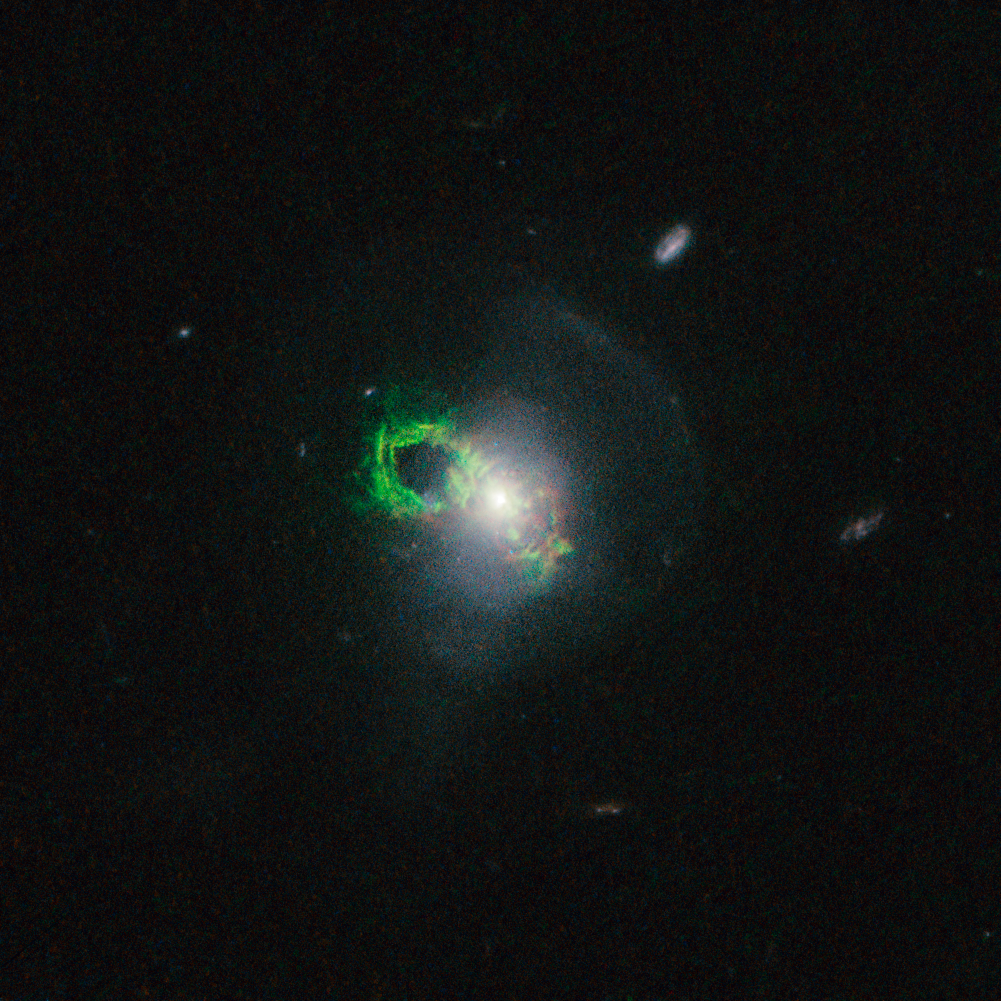

Hubble view of green filament in Teacup galaxy

This new NASA/ESA Hubble Space Telescope image shows ghostly green filaments, lying within the galaxy Teacup (also known as 2MASX J14302986+1339117). This filament was illuminated by a blast of radiation from a quasar — a very luminous and compact region that surrounds the supermassive black hole at the centre of its host galaxy.

Its bright green hue is a result of ionised oxygen, which glows brightly at green wavelengths.

Credit: NASA, ESA, W. Keel (University of Alabama, USA)